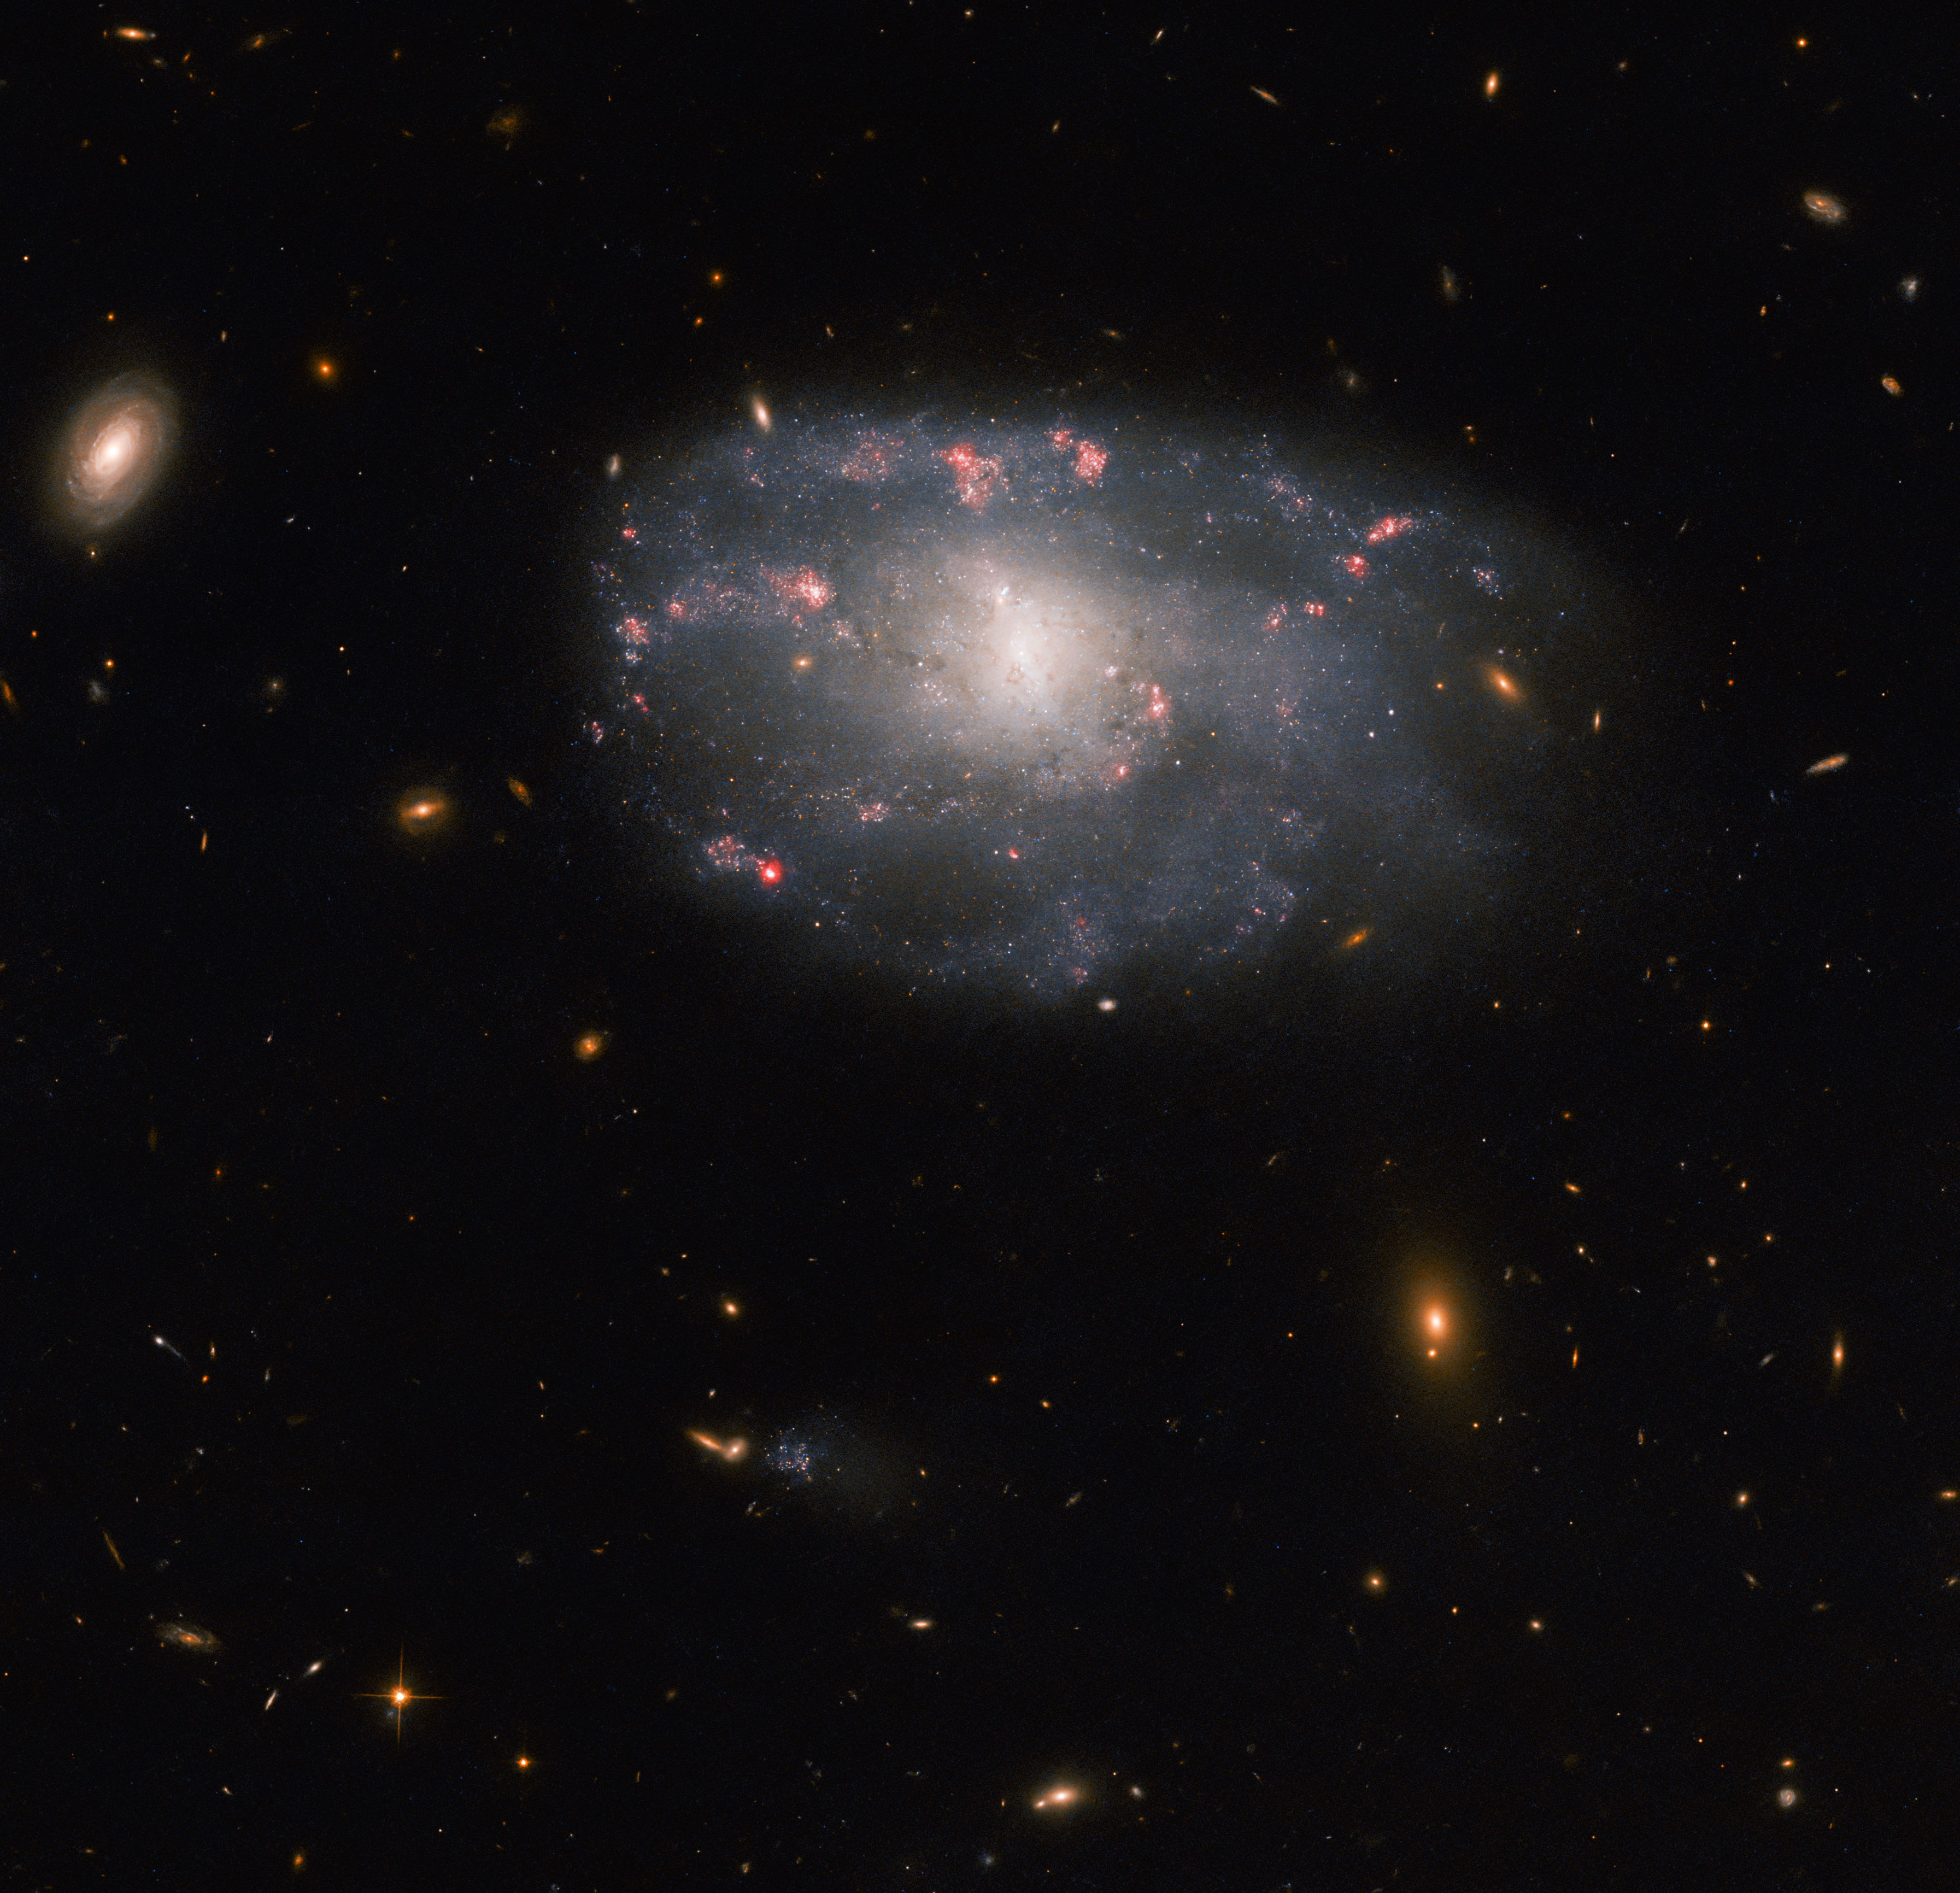

Hubble spies a meandering spiral (wide field)

This image shows a wider view of the dim, distant galaxies around the irregular spiral galaxy NGC 5486. The tenuous disc of the galaxy is threaded through with pink wisps of star formation, which stand out from the diffuse glow of the galaxy’s bright core. While this particular galaxy has indistinct, meandering spiral arms it lies close to the much larger Pinwheel Galaxy, one of the best known examples of ‘grand design’ spiral galaxies with prominent and well-defined spiral arms. In 2006 Hubble captured an image of the Pinwheel Galaxy which was — at the time — the largest and most detailed photo of a spiral galaxy ever taken with Hubble.

NGC 5486 lies 110 million light-years from Earth in the constellation Ursa Major. Constellations are not only patterns of bright stars, but also a system that astronomers use to divide the sky into regions. There are 88 of these regions, and each has an associated constellation depicting a mythological figure, an animal, or even an item of scientific equipment. This strange celestial menagerie contains everything from Ursa Major’s great bear to a toucan, a sea monster, a telescope, and even a painter's easel!

This observation comes from a selection of Hubble images exploring the detritus left behind by Type II supernovae. As massive stars reach the end of their lives they cast off huge amounts of gas and dust before ending their lives in titanic supernova explosions. NGC 5486 hosted a supernova in 2004, and astronomers used the keen vision of Hubble’s Advanced Camera for Surveys to explore the aftermath in the hopes of learning more about these explosive events.

Credit: ESA/Hubble & NASA, C. Kilpatrick